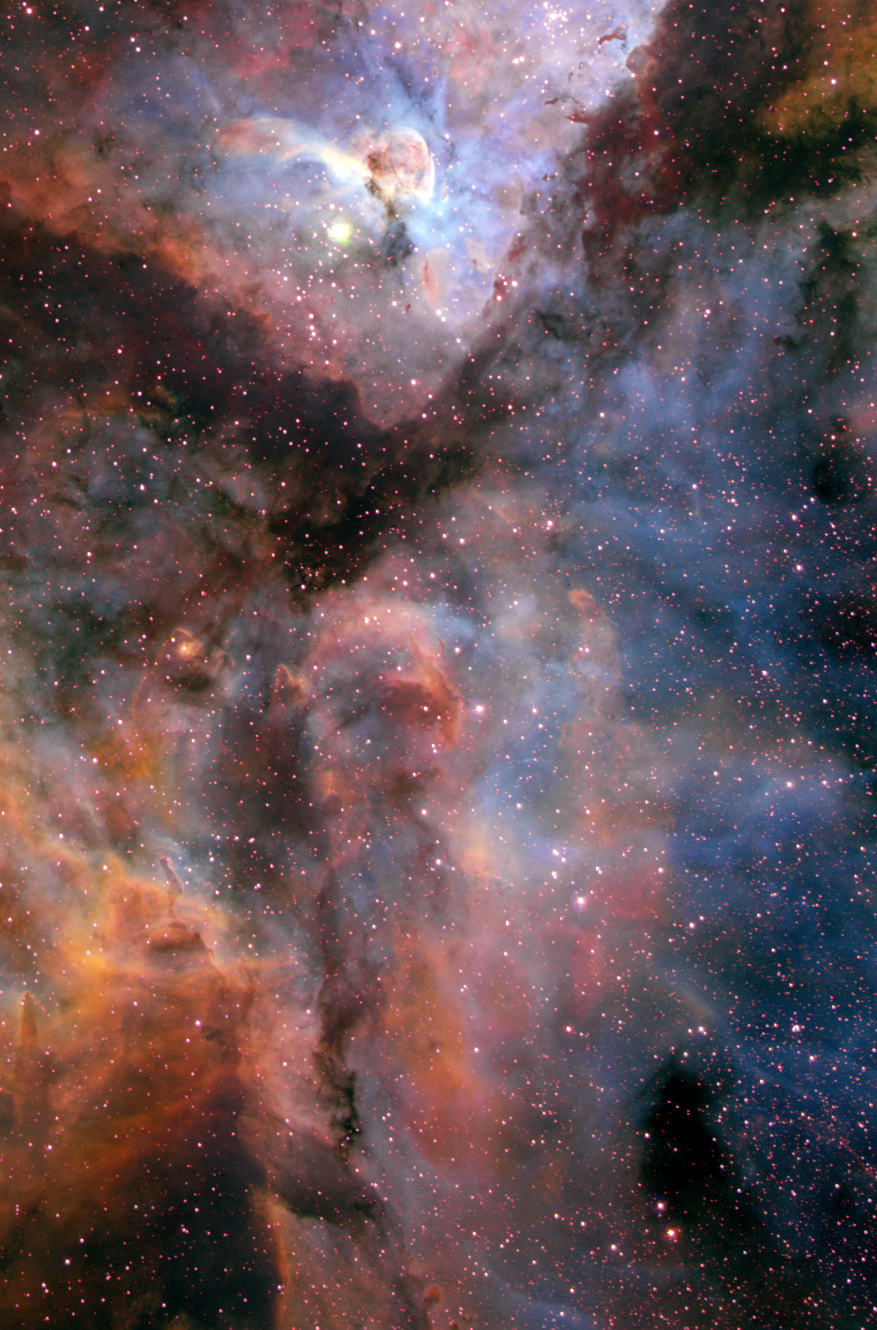

Carina Nebula (ground-based image)

This image shows a giant star-forming region in the southern sky known as the Carina Nebula and combines the light from three different filters, which traces emission from oxygen (blue), hydrogen (green), and sulfur (red). The colour is also representative of the temperature in the ionized gas: blue is relatively hot and red is cooler. The picture is a composite of several exposures made in February 2000 with the Curtis Schmidt telescope at the Cerro Tololo Inter-American Observatory (CTIO) in Chile.

Credit: NOAO, AURA, NSF, and N. Smith (University of Arizona)